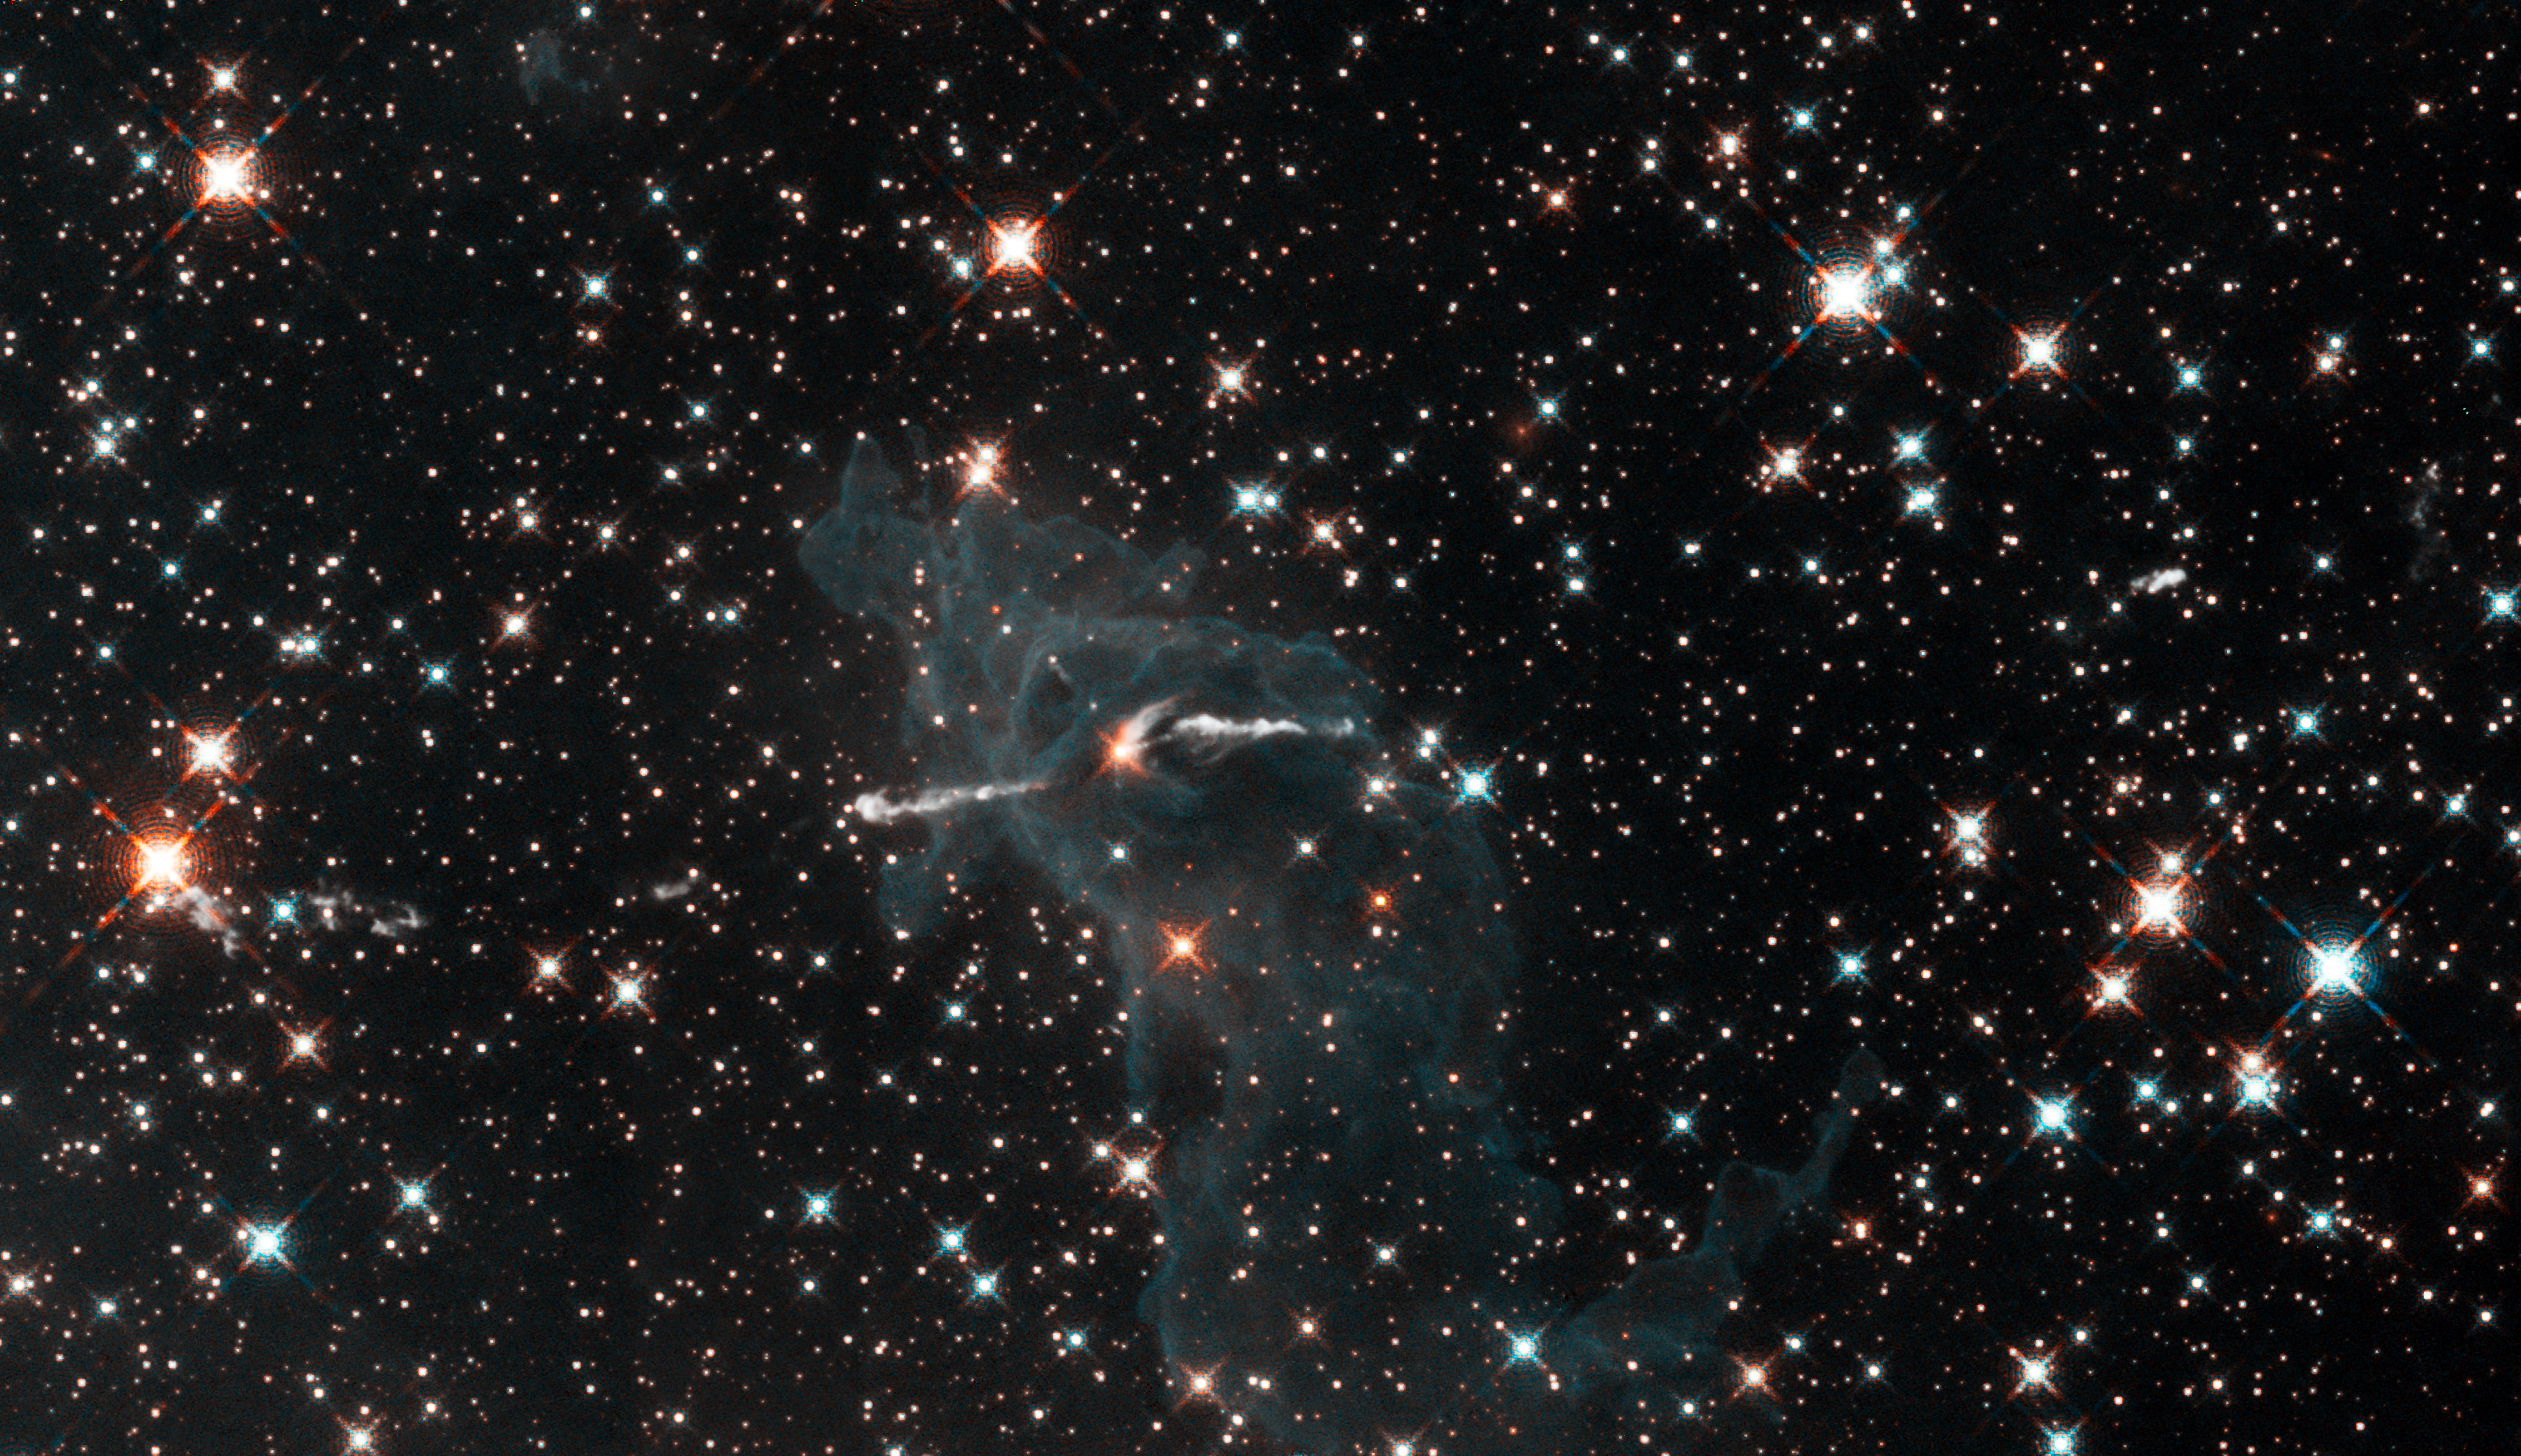

WFC3 infrared image of Carina Nebula

Composed of gas and dust, the pictured pillar resides in a tempestuous stellar nursery called the Carina Nebula, located 7500 light-years away in the southern constellation of Carina.

Taken in infrared light, the image shows the dense column and the surrounding greenish-coloured gas all but disappear. Only a faint outline of the pillar remains. By penetrating the wall of gas and dust, the infrared vision of WFC3 reveals the infant star that is probably blasting the jet. Part of the jet nearest the star is more prominent in this view. These features can be seen because infrared light, unlike visible light, can pass through the dust.

Hubble's Wide Field Camera 3 observed the Carina Nebula on 24-30 July 2009. WFC3 was installed aboard Hubble in May 2009 during Servicing Mission 4. The composite image was made from filters that isolate emission from iron, magnesium, oxygen, hydrogen and sulphur.

These Hubble observations of the Carina Nebula are part of the Hubble Servicing Mission 4 Early Release Observations.

Credit: NASA, ESA and the Hubble SM4 ERO Team